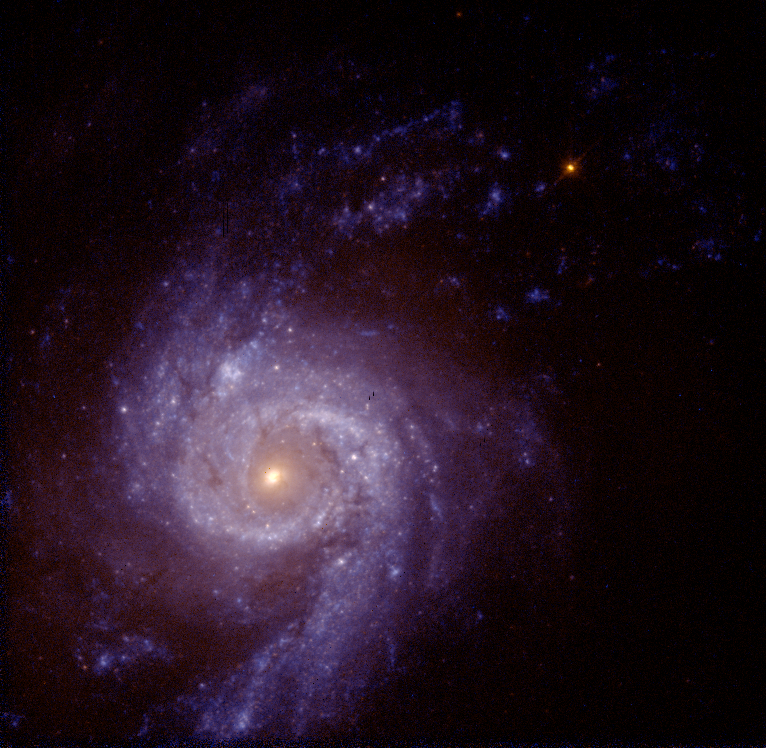

Spiral Galaxy NGC 3310

The central region of the 'star-burst' spiral galaxy NGC 3310 shows young and old stars evenly distributed. If this were the case with most galaxies, astronomers would be able to recognize faraway galaxies fairly easily. In most galaxies, however, the stars are segregated by age, making classifying the distant ones more difficult.

Credit: Rogier Windhorst (Arizona State University, Tempe, AZ), the Hubble mid-UV team and NASA/ESA